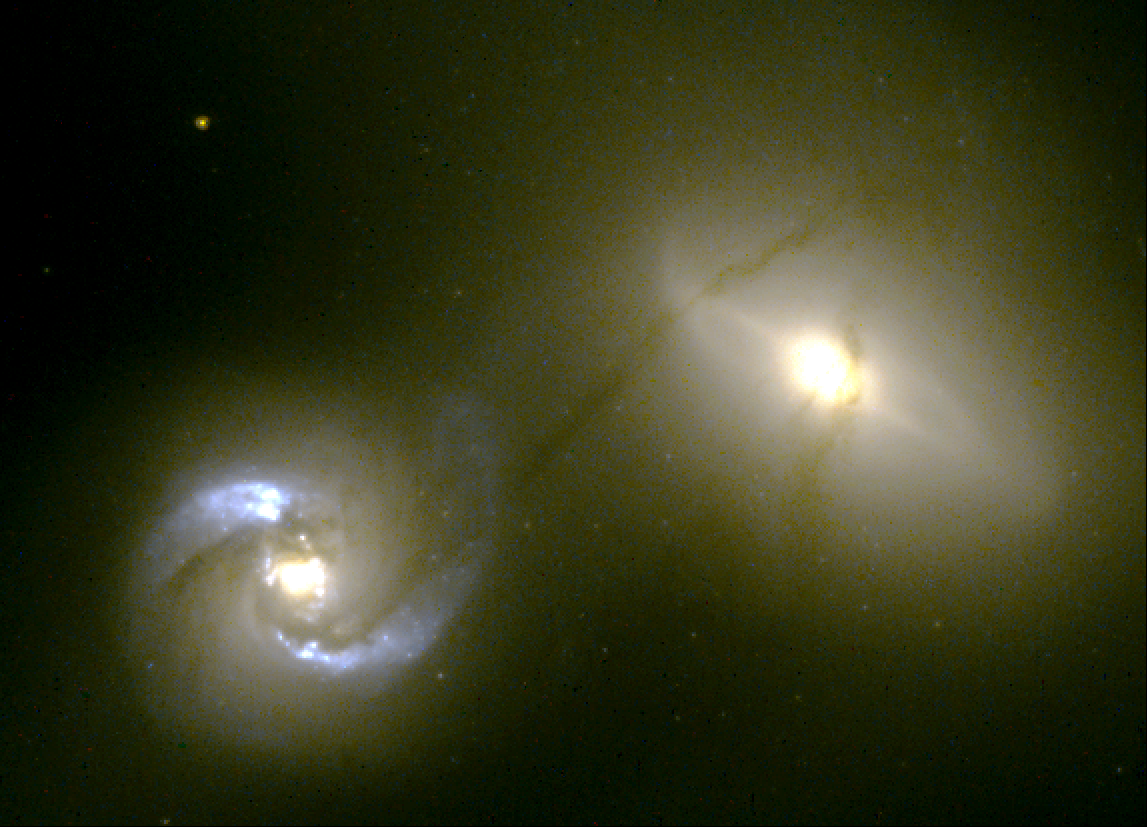

Intergalactic pipeline

This visible-light picture, taken by the Hubble telescope, reveals an intergalactic 'pipeline' of material flowing between two battered galaxies that bumped into each other about 100 million years ago. The pipeline [the dark string of matter] begins in NGC 1410 [the galaxy at left], crosses over 20, 000 light-years of intergalactic space, and wraps around NGC 1409 [the companion galaxy at right] like a ribbon around a package. The galaxies reside about 300 million light-years from Earth in the constellation Taurus.

Credit: William C. Keel (University of Alabama, Tuscaloosa) and NASA/ESA